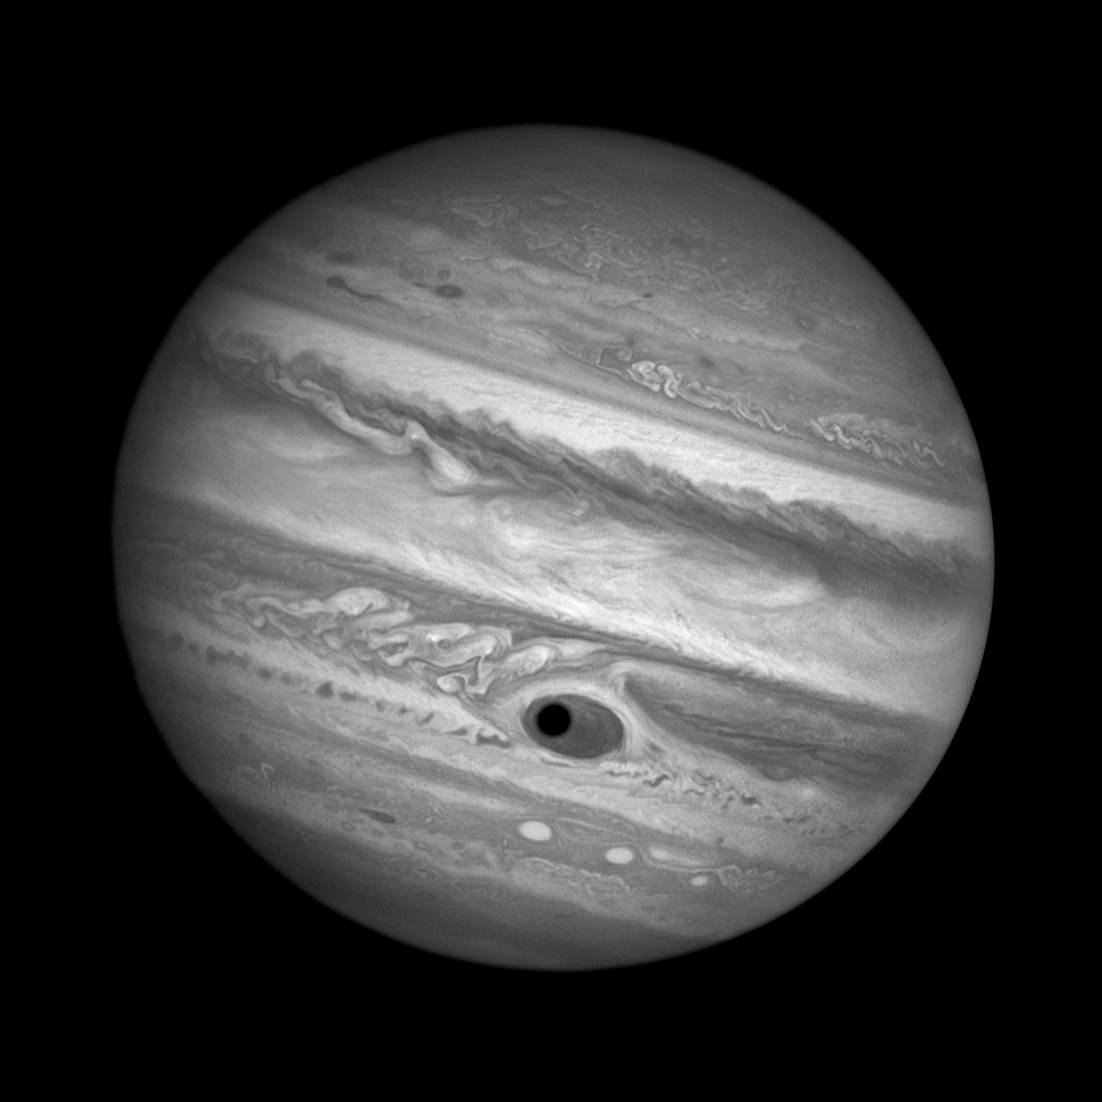

Jupiter's Great Red Spot and Ganymede's shadow — black and white

This NASA/ESA Hubble Space Telescope image shows a gorgeous close-up view of the planet Jupiter.

Astronomers were using Hubble to monitor changes in Jupiter's immense Great Red Spot (GRS) storm. During the exposures, on 21 April 2014, the shadow of the Jovian moon Ganymede swept across the center of the GRS. Giving the giant planet the uncanny appearance of having a pupil in the center of a 16 000 kilometre wide eye.

Credit: NASA, ESA, and A. Simon (Goddard Space Flight Center) Acknowledgment: C. Go and the Hubble Heritage Team (STScI/AURA)